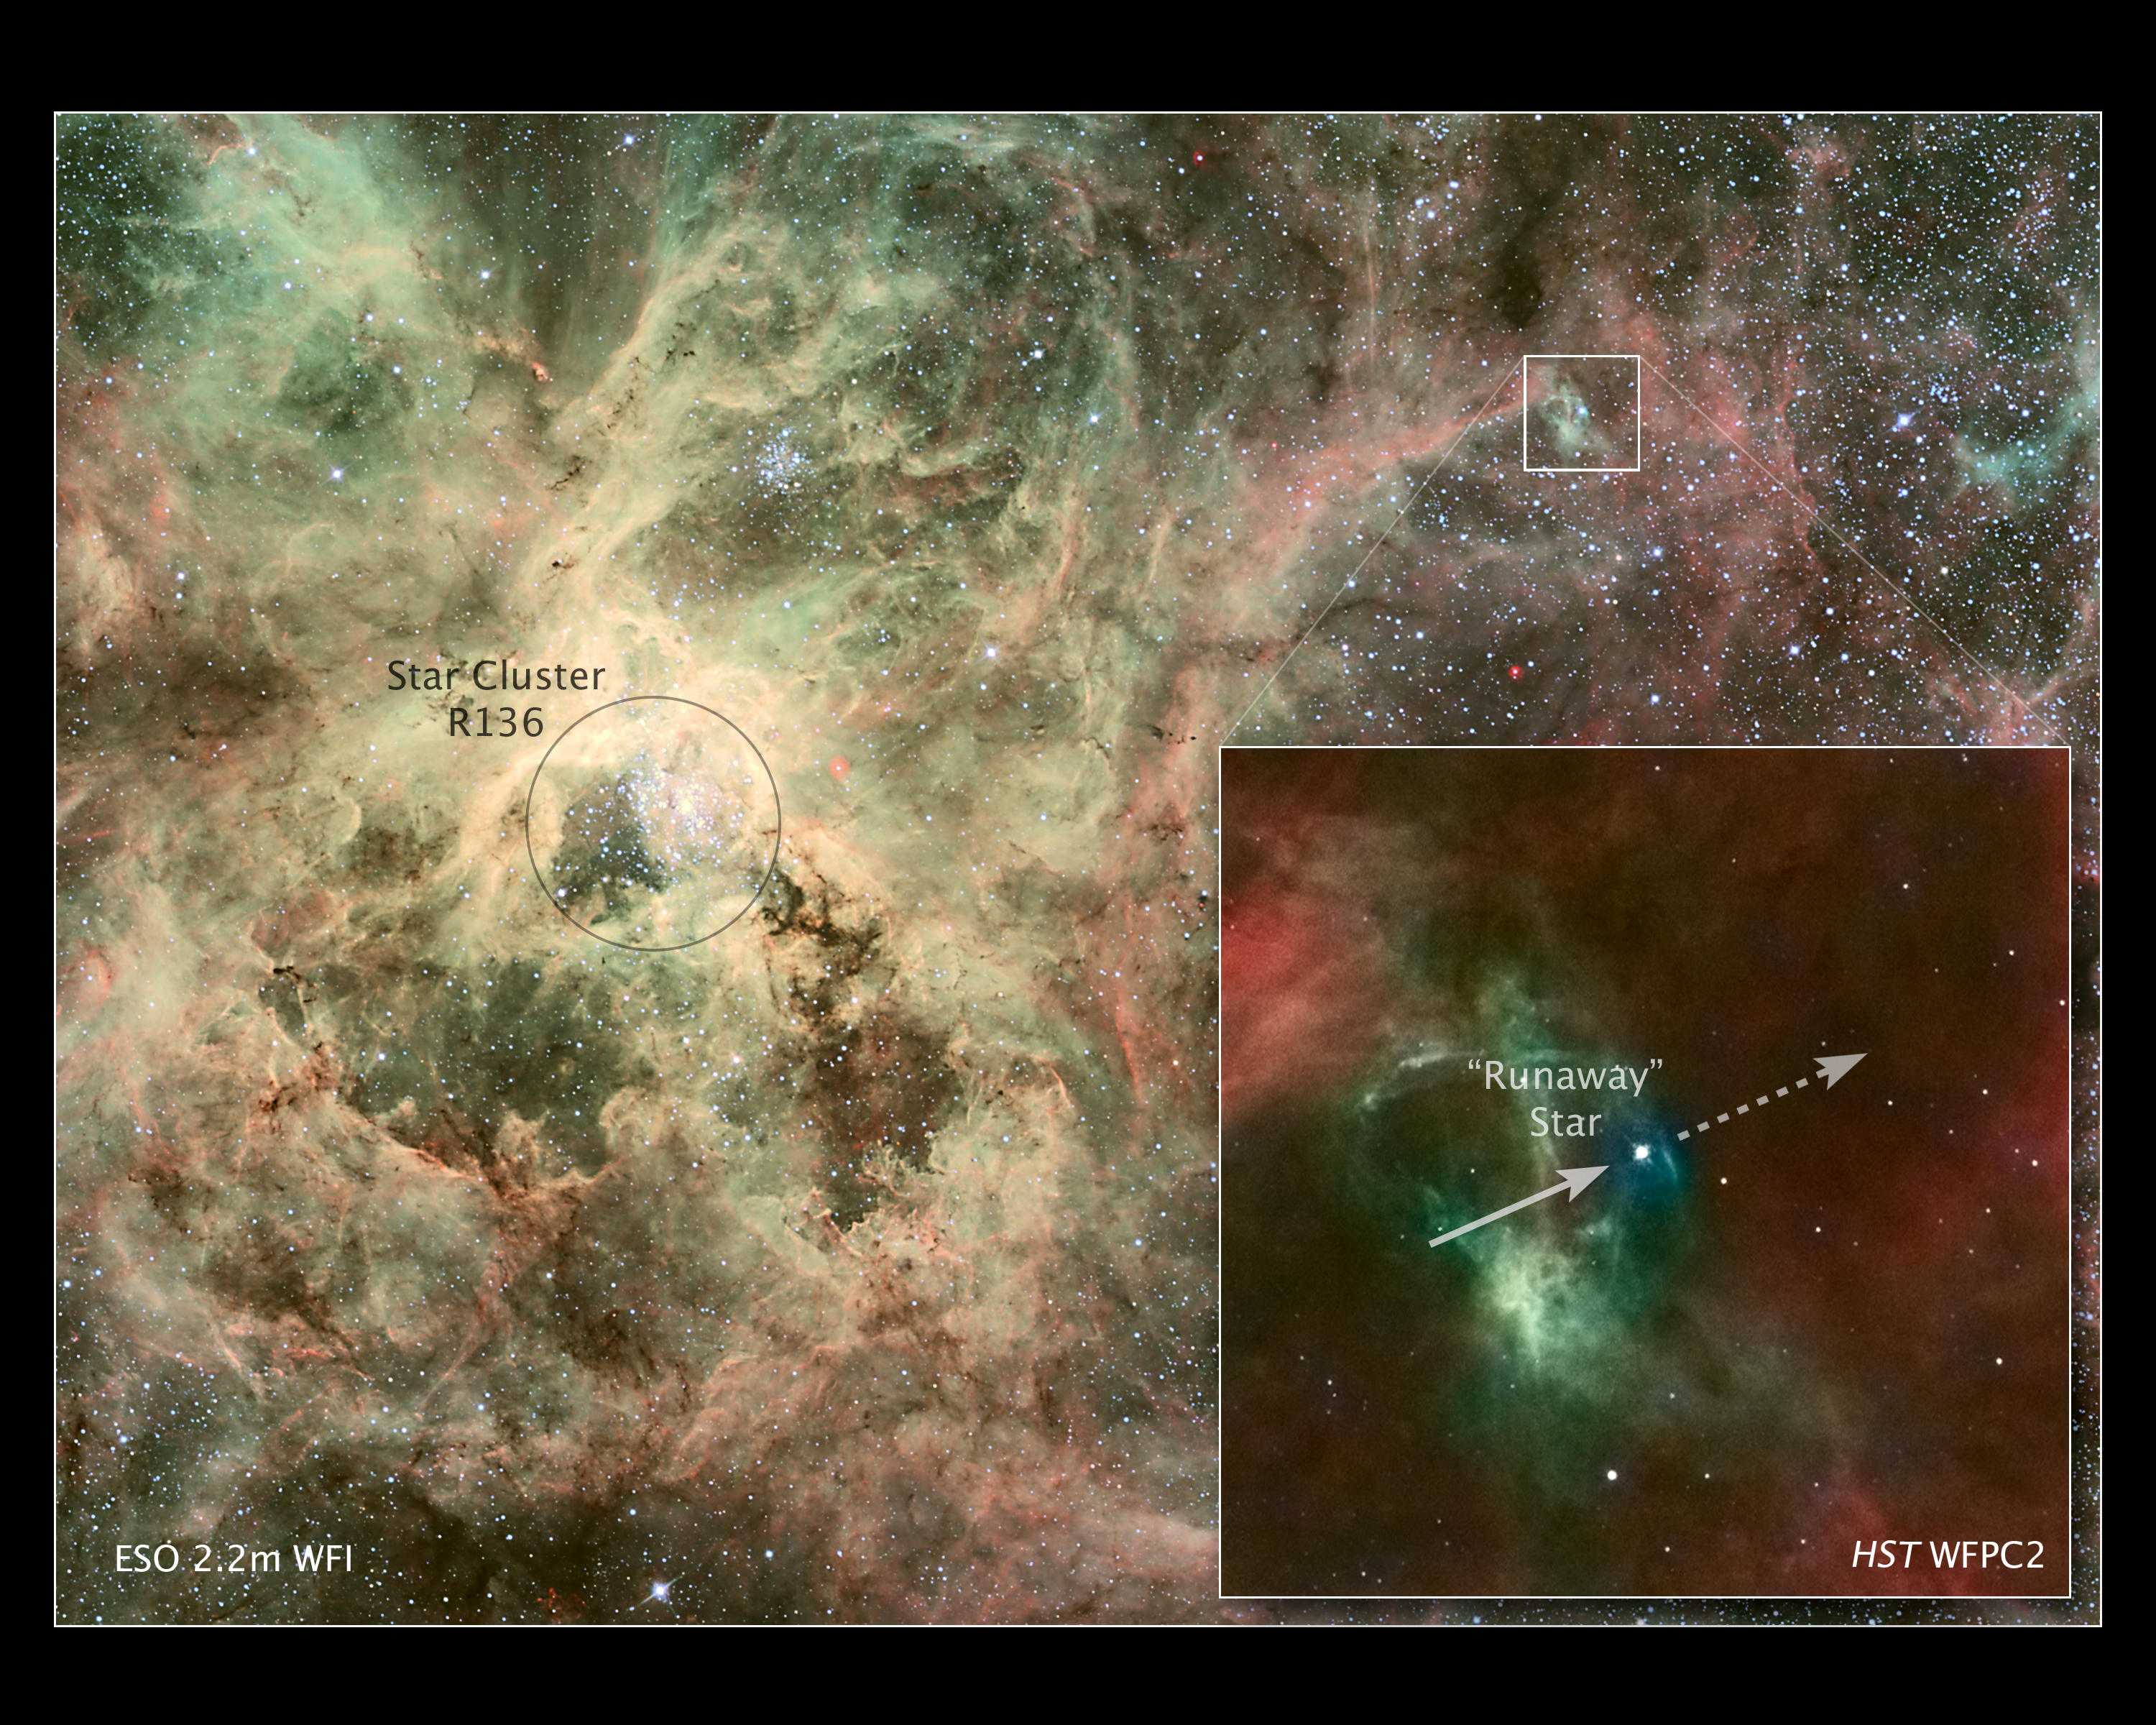

Astronomers nab runaway star

In the inset image at right, an arrow points to the stellar runaway and a dashed arrow to its presumed direction of motion. The image was taken by the Wide Field and Planetary Camera 2 (WFPC2) aboard the NASA/ESA Hubble Space Telescope. The heavyweight star, called 30 Dor #016, is 90 times more massive than the Sun and is travelling at more than 400 000 kilometres an hour from its home.

In the wider view of 30 Doradus, the homeless star, located on the outskirts of the nebula, is centred within a white box. The box shows Hubble’s field of view. The image was taken by the European Southern Observatory’s (ESO) Wide Field Imager at the MPG/ESO 2.2-metre telescope on La Silla, Chile.

The young star, only one million to two million years old, may have travelled about 375 light-years from its suspected home in R136, the bright star cluster marked by a circle. Nestled in the core of 30 Doradus, R136 is one of the most massive young star clusters in nearby galaxies, containing several stars topping 100 solar masses each. 30 Doradus, also called the Tarantula Nebula, resides roughly 170 000 light-years from Earth, in the Large Magellanic Cloud.

Instruments at three observatories, including Hubble’s WFPC2 and recently installed Cosmic Origins Spectrograph, have provided tantalising clues that the star was ejected from R136.

In the ESO and WFPC2 images, hot stars are represented by the colour blue. Hydrogen is in red and oxygen in green. Radiation from the runaway star is making the nebula glow.

The Hubble image was taken on 30 June 1995; the ESO image was released in December 2006.

Credit: NASA, ESA, J. Walsh (ST-ECF) Acknowledgment: Z. Levay (STScI)
Credit for ESO image: ESO Acknowledgments: J. Alves (Calar Alto, Spain), B. Vandame, and Y. Beletski (ESO) Processing by B. Fosbury (ST-ECF)